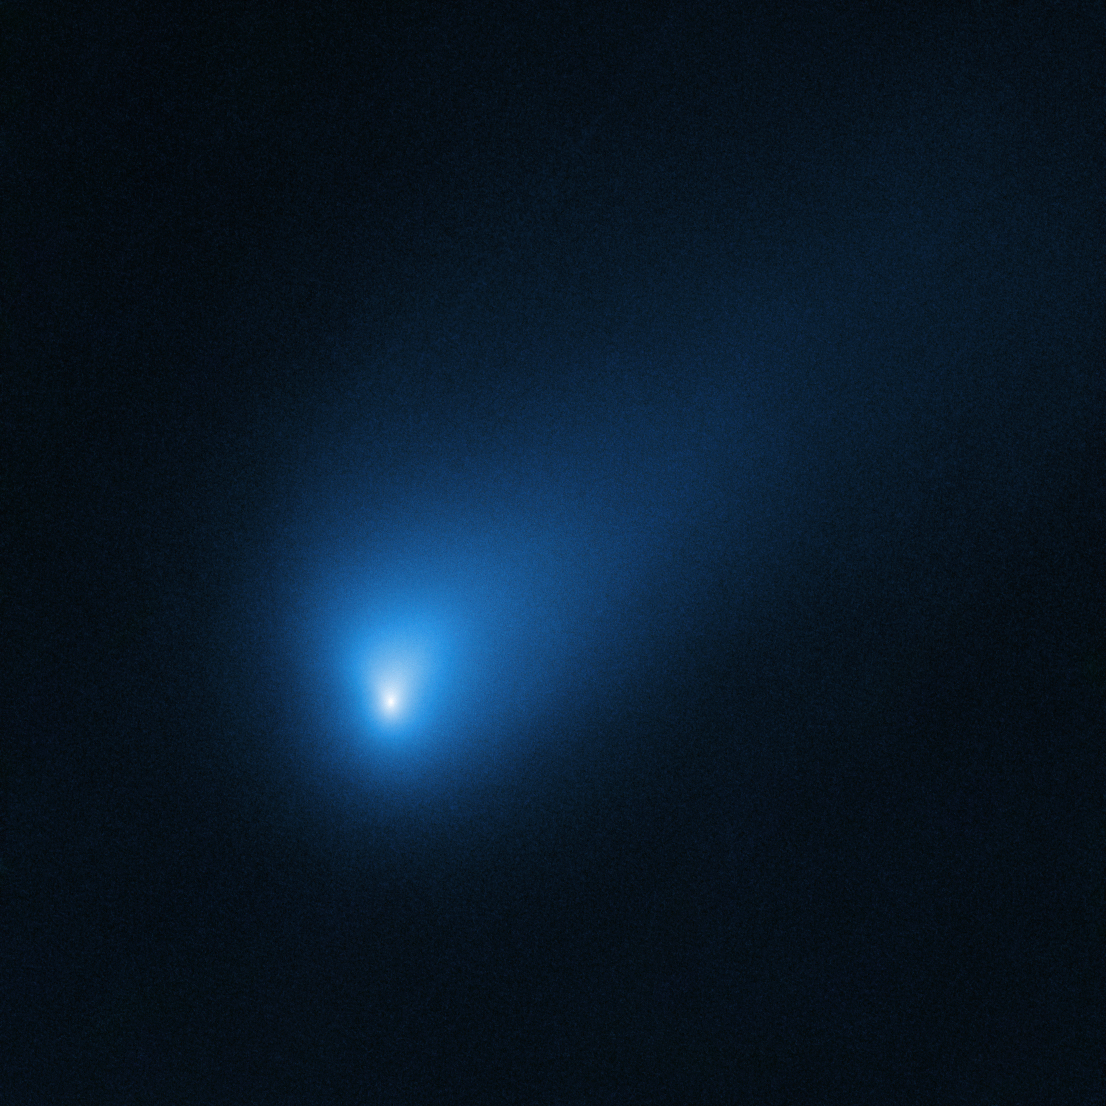

Hubble’s Observation of Comet 2I/Borisov in October 2019

On 12 October 2019, the NASA/ESA Hubble Space Telescope observed Comet 2I/Borisov at a distance of approximately 420 million kilometres from Earth. The comet is believed to have arrived here from another planetary system elsewhere in our galaxy.

Credit: NASA, ESA, D. Jewitt (UCLA)